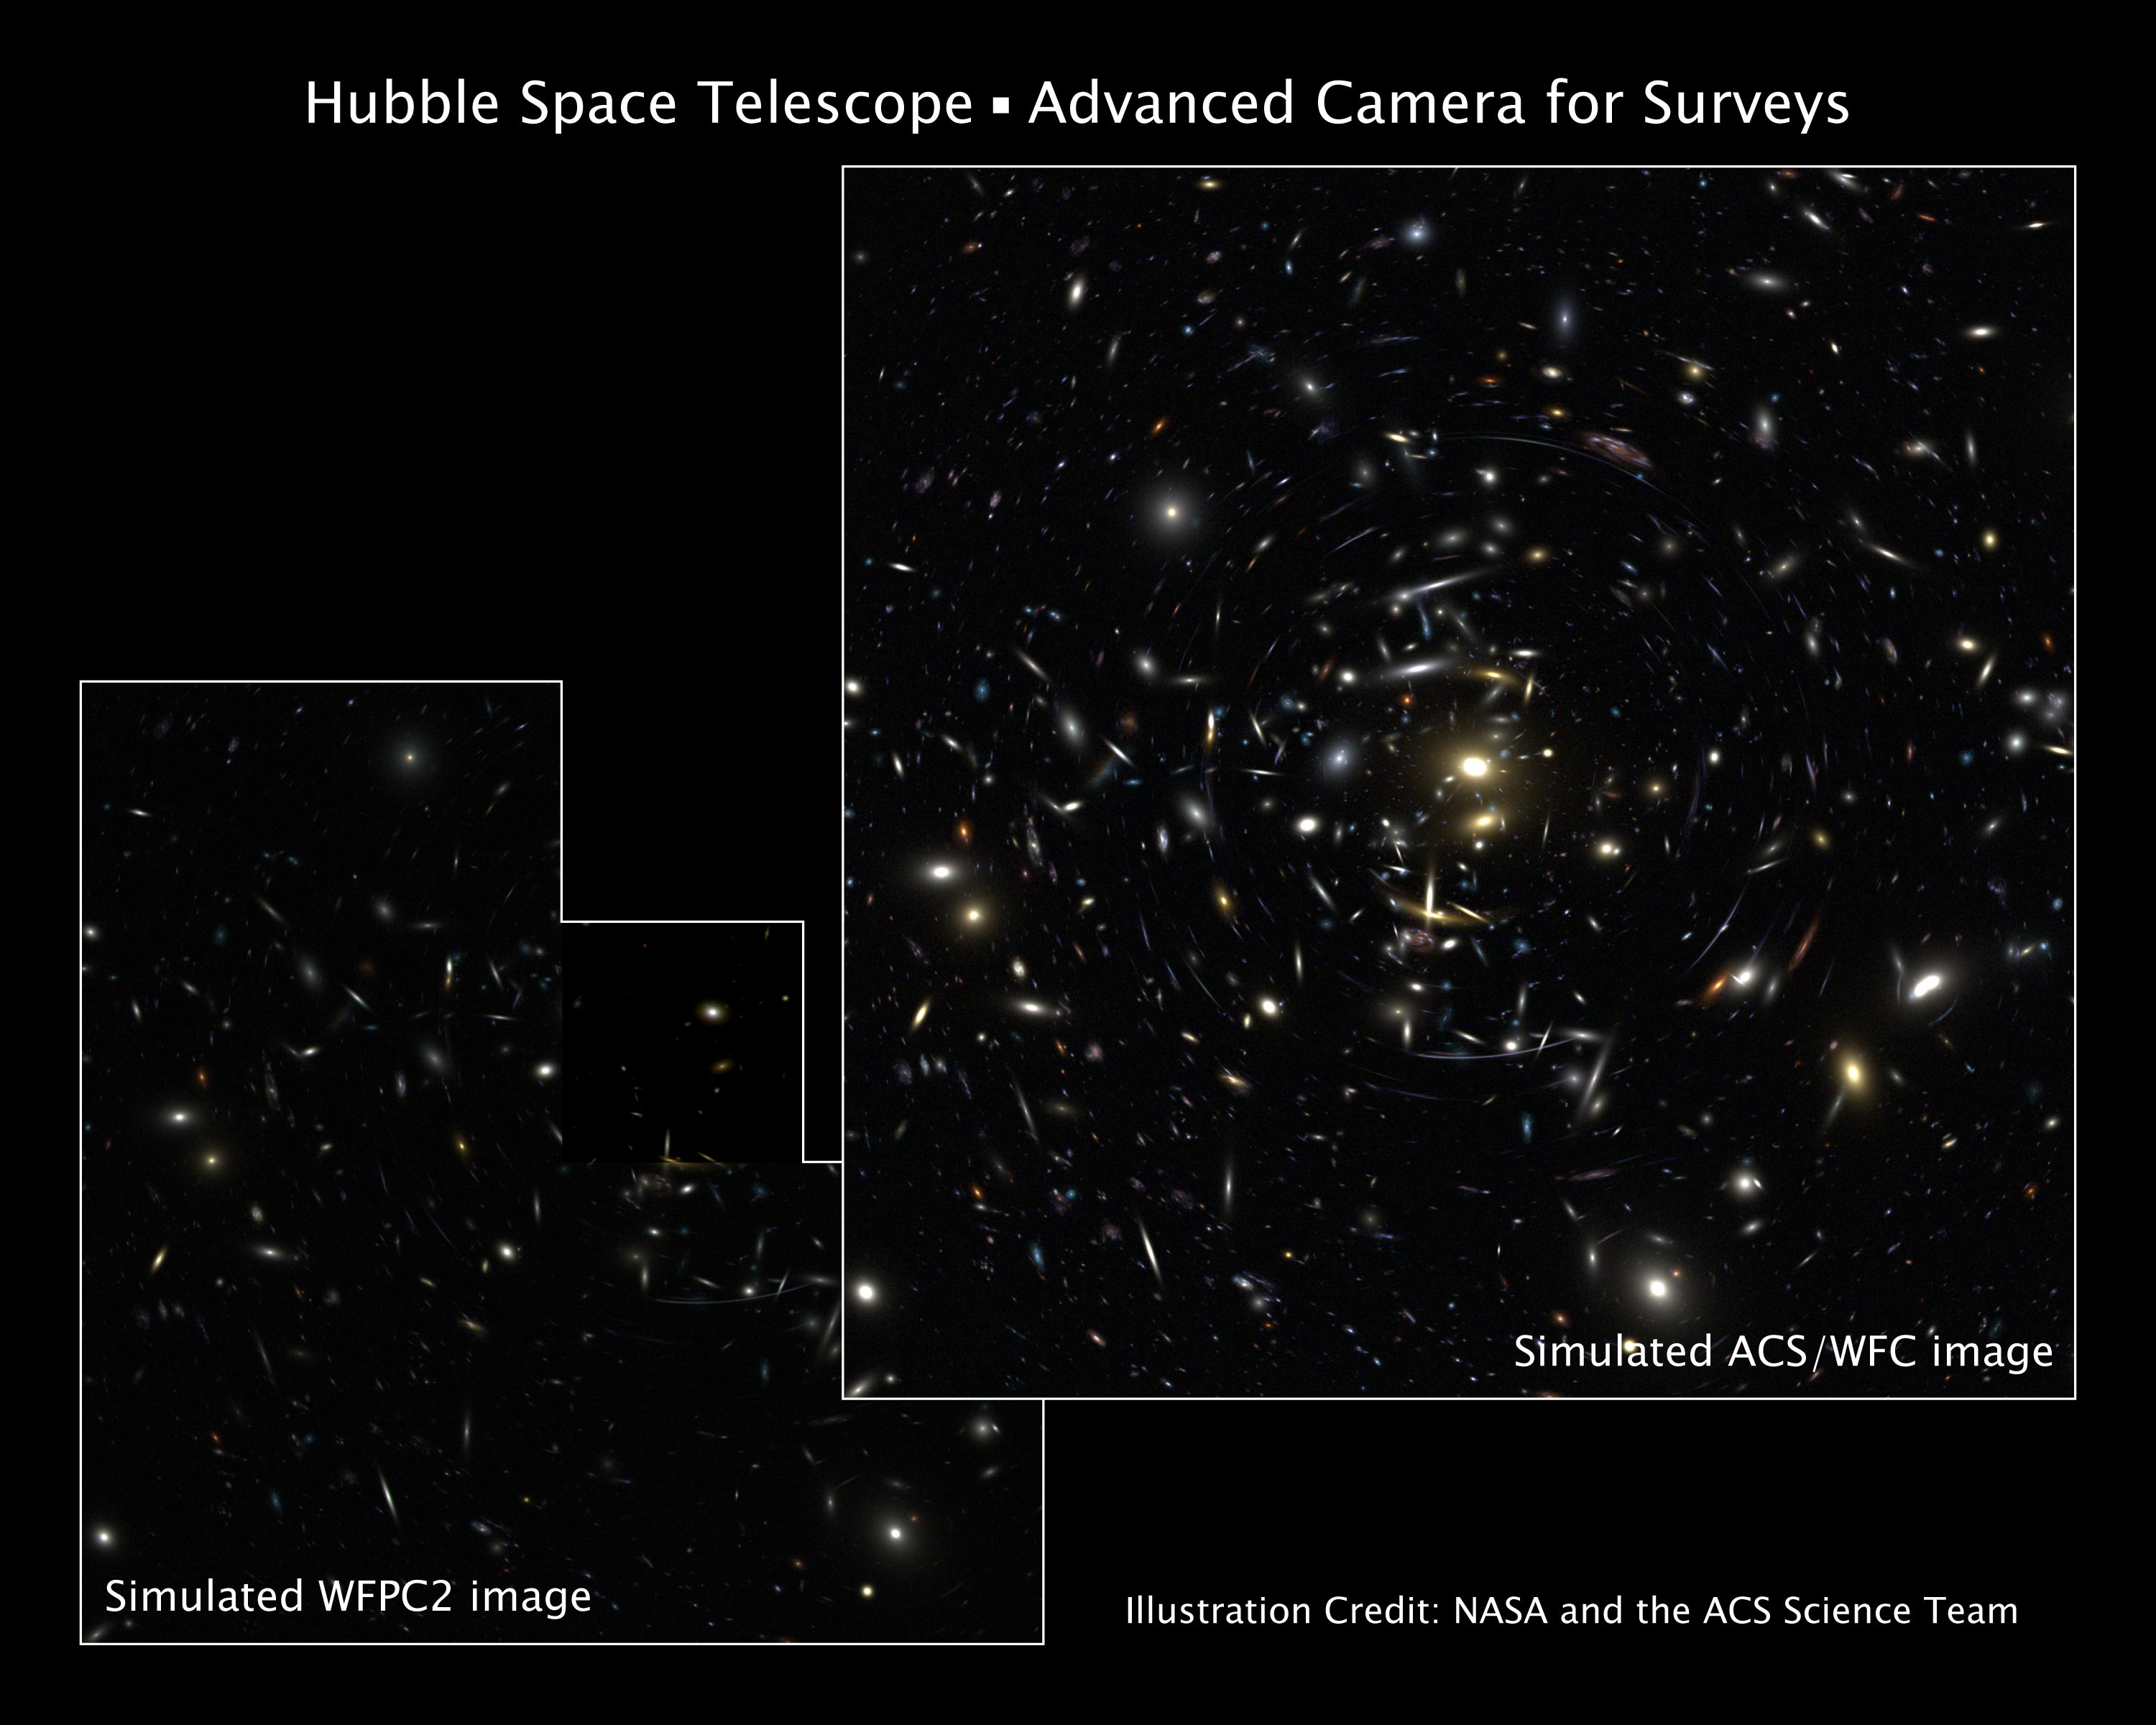

Advanced Camera for Surveys

NASA's Servicing Mission 3B for the Hubble Space Telescope will give the orbiting observatory a new camera that will significantly increase Hubble's abilities and enable a broad array of new astronomical discoveries. The Advanced Camera for Surveys (ACS) covers twice the area, has twice the sharpness, and is up to five times more sensitive to light than Hubble's workhorse camera, the Wide Field and Planetary Camera 2. The servicing mission will begin on Feb. 28 with the launch of the space shuttle Columbia. The simulated image [above, right] depicts how the cosmos will look through the 'eyes' of the ACS.

Credit: NASA/ESA and the ACS Science Team